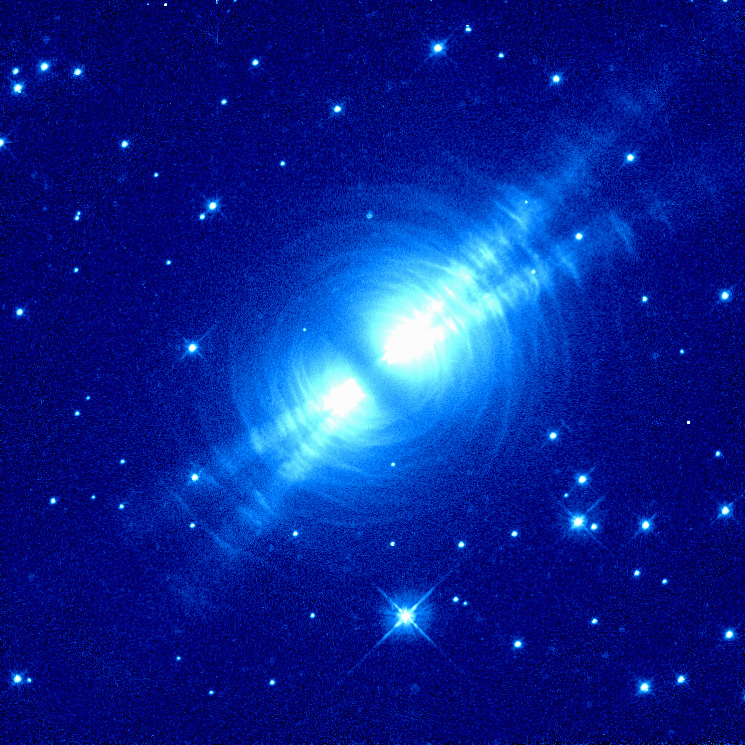

The Egg Nebula

This image of the Egg Nebula, also known as CRL2688 and located roughly 3, 000 light-years from us, was taken in red light with the Wide Field and Planetary Camera 2 (WFPC2) aboard the Hubble Space Telescope.

This image sheds new light on the poorly understood ejection of stellar matter which accompanies the slow death of Sun-like stars. The image is shown in false color.

Credit: Raghvendra Sahai and John Trauger (JPL), the WFPC2 science team, and NASA/ESA